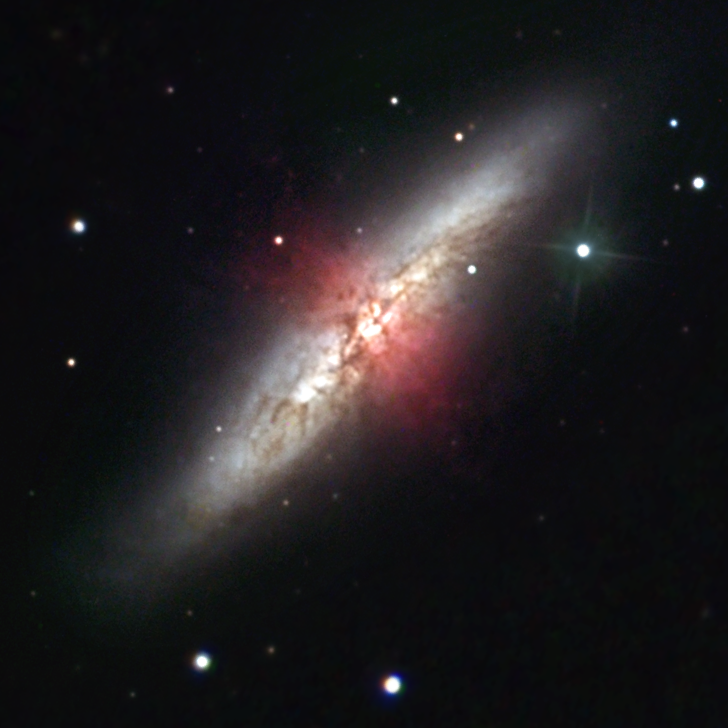

Ground-based close-up view of M82

This ground-based image of M82 was taken by Robert Gendler with a 12 inch telescope from a suburb outside Hartford, Connecticut. Credit: Robert Gendler

Credit: Robert Gendler